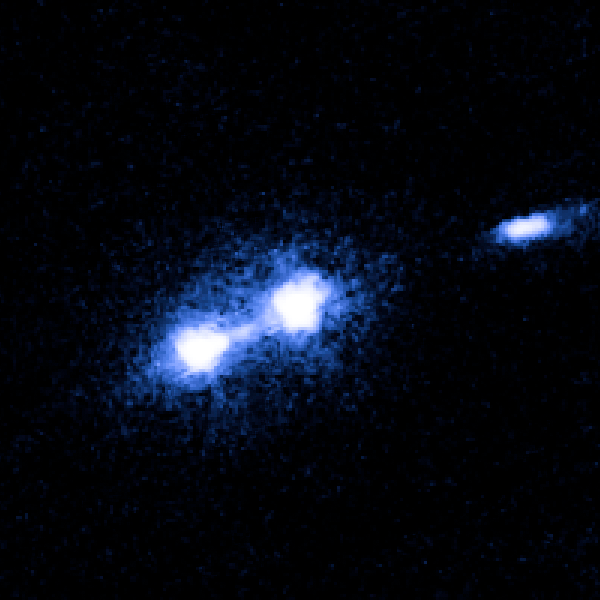

M87 nucleus and bright knot

Image taken on 28 November 2006.

Credit: NASA, ESA and J. Madrid (McMaster University, Canada)